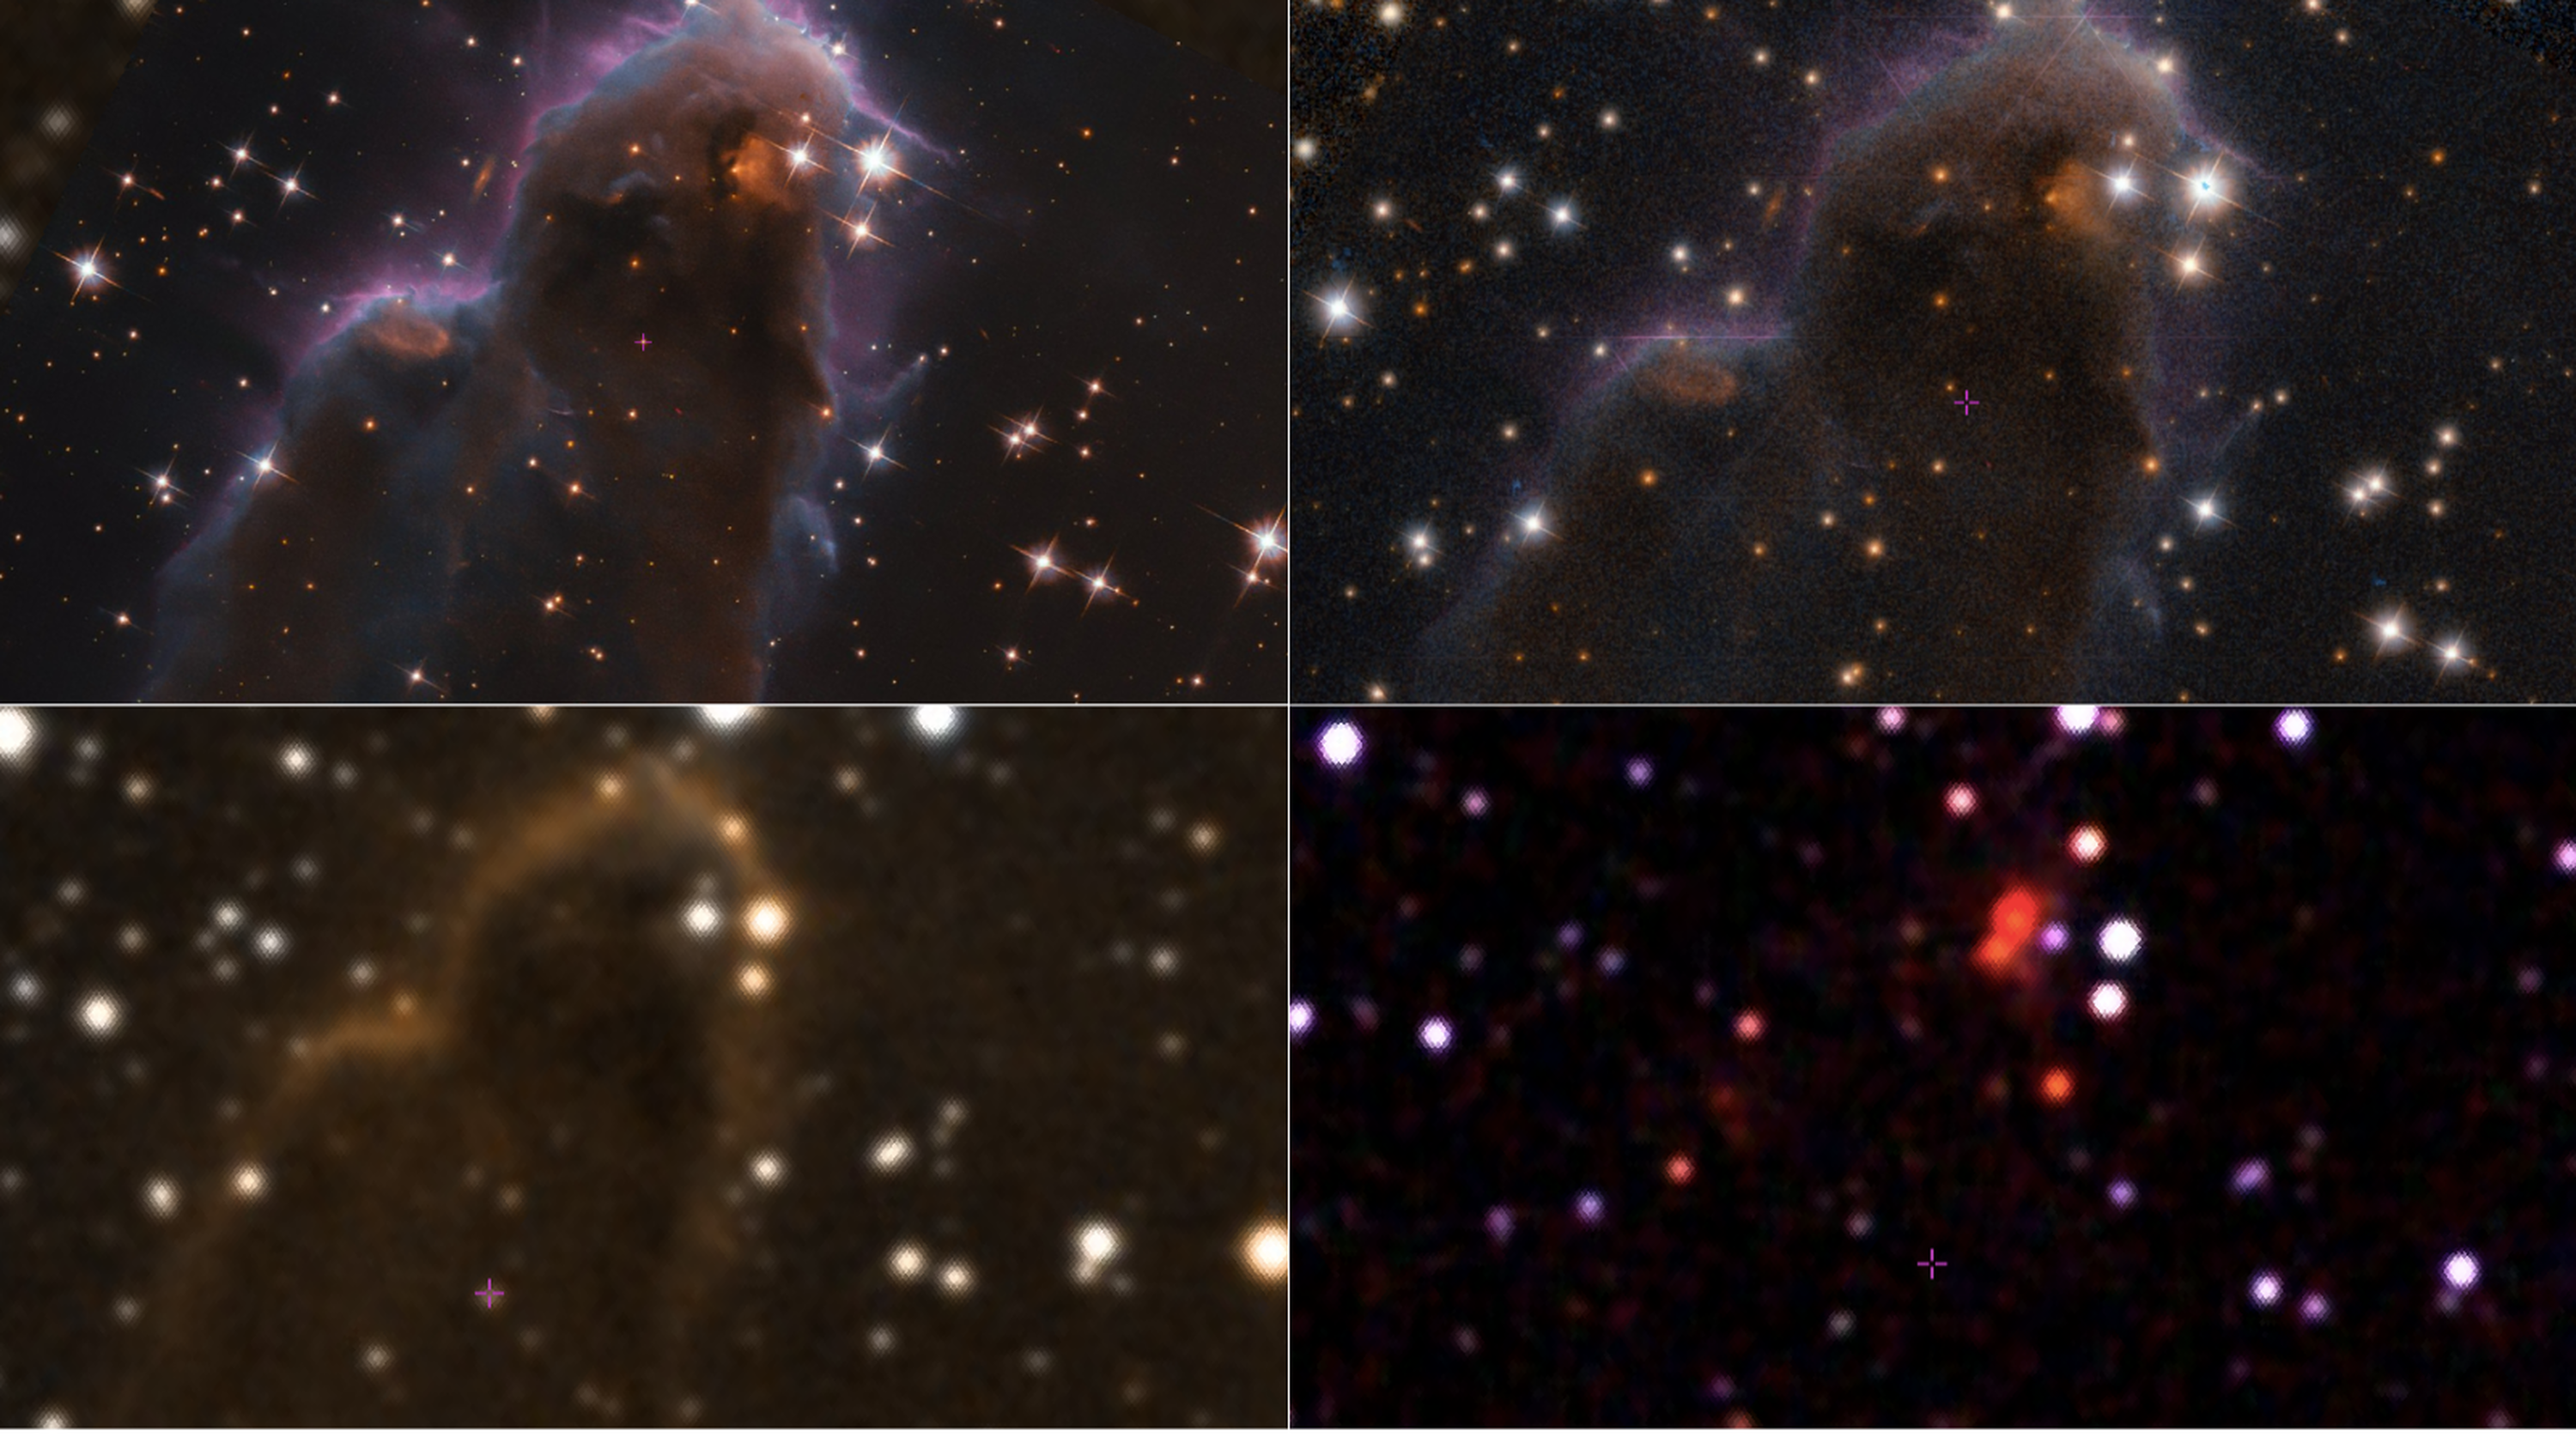

Exploring the Interactive ESA/Hubble image app

This montage illustrates how the Aladin Lite Interactive app can be used to view astronomical objects by comparing multi-wavelength datasets.

The object depicted is an example of a special class of star-forming nursery known as Free-floating Evaporating Gaseous Globules, or frEGGs for short. This object is formally known as J025157.5+600606. Learn more about the object featured in this image here.

More notably, the infrared image (bottom right) allows the viewers to see through the dust and gas. Meanwhile, the optical filters (top images) display the colourful features of this star-forming nursery. The image on the bottom-left is a cross-fade between the optical and infrared images.

Credit: ESA/Hubble & NASA, R. Sahai